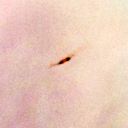

321-602

One of 42 new proplyds discovered in the Orion Nebula, 321-602 is one of the dark proplyds that lies relatively far from the nebula’s brightest star, Theta 1 Orionis C.

Credit: NASA/ESA and L. Ricci (ESO)